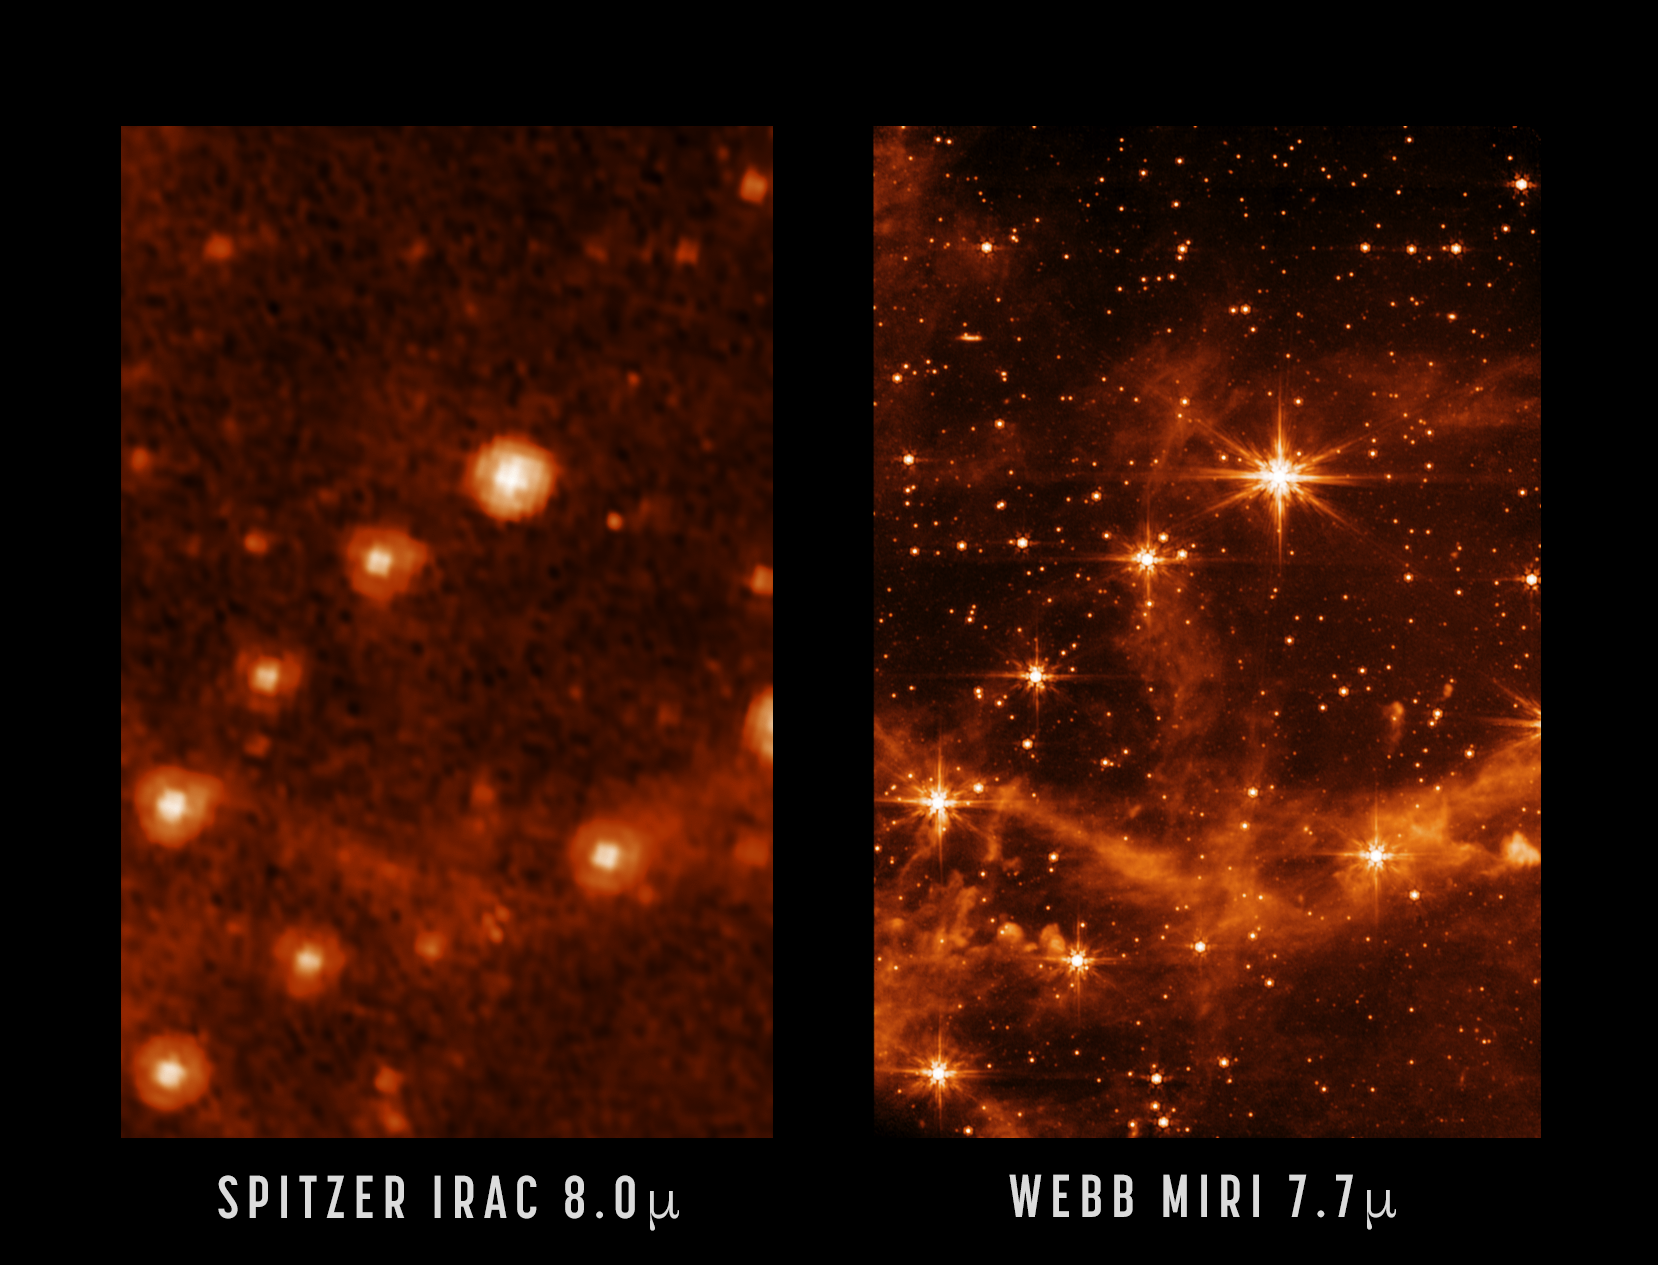

MIRI and Spitzer Comparison Image

This MIRI test image (at 7.7 microns) shows part of the Large Magellanic Cloud. This small satellite galaxy of the Milky Way provided a dense star field to test Webb’s performance.

Here, a close-up of the MIRI image is compared to a past image of the same target taken with NASA’s Spitzer Space Telescope’s Infrared Array Camera (at 8.0 microns). The retired Spitzer was the first observatory to provide high-resolution images of the near- and mid-infrared Universe. Webb, by virtue of its significantly larger primary mirror and improved detectors, will allow us to see the infrared sky with improved clarity, enabling even more discoveries.

For example, Webb’s MIRI image shows the interstellar gas in unprecedented detail. Here, you can see the emission from ‘polycyclic aromatic hydrocarbons’ – molecules of carbon and hydrogen that play an important role in the thermal balance and chemistry of interstellar gas. When Webb is ready to begin science observations, studies such as these with MIRI will help give astronomers new insights into the birth of stars and protoplanetary systems.

Credit: NASA/JPL-Caltech; MIRI: NASA/ESA/CSA/STScI